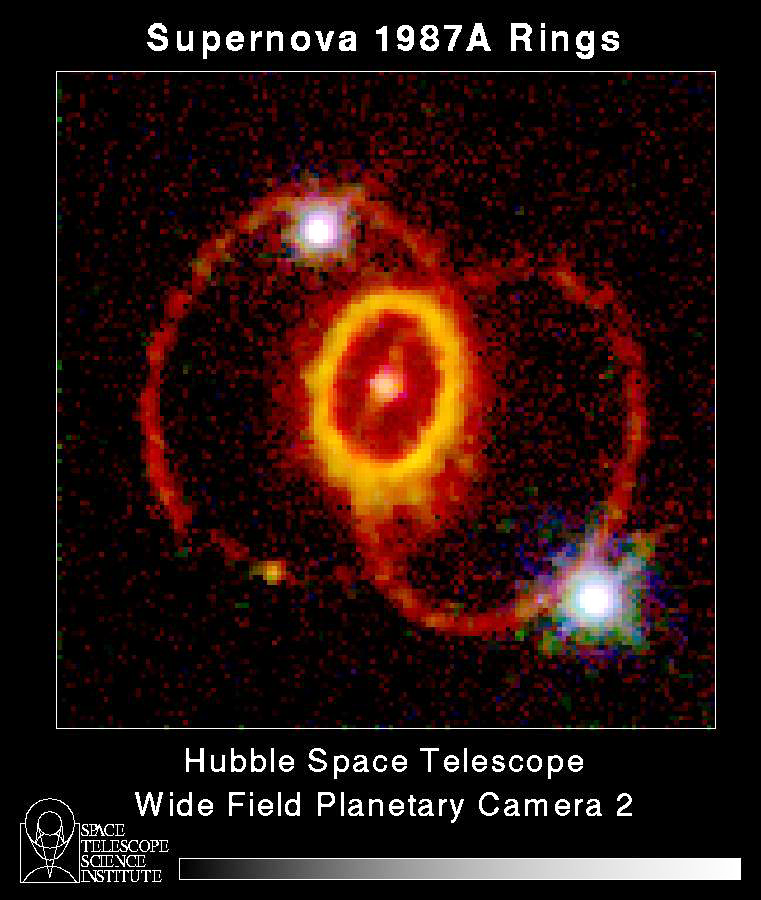

Supernova 1987A Rings

This striking NASA/ESA Hubble Space Telescope picture shows three rings of glowing gas encircling the site of supernova 1987A, a star which exploded in February 1987.

Credit: Dr. Christopher Burrows, ESA/STScI and NASA